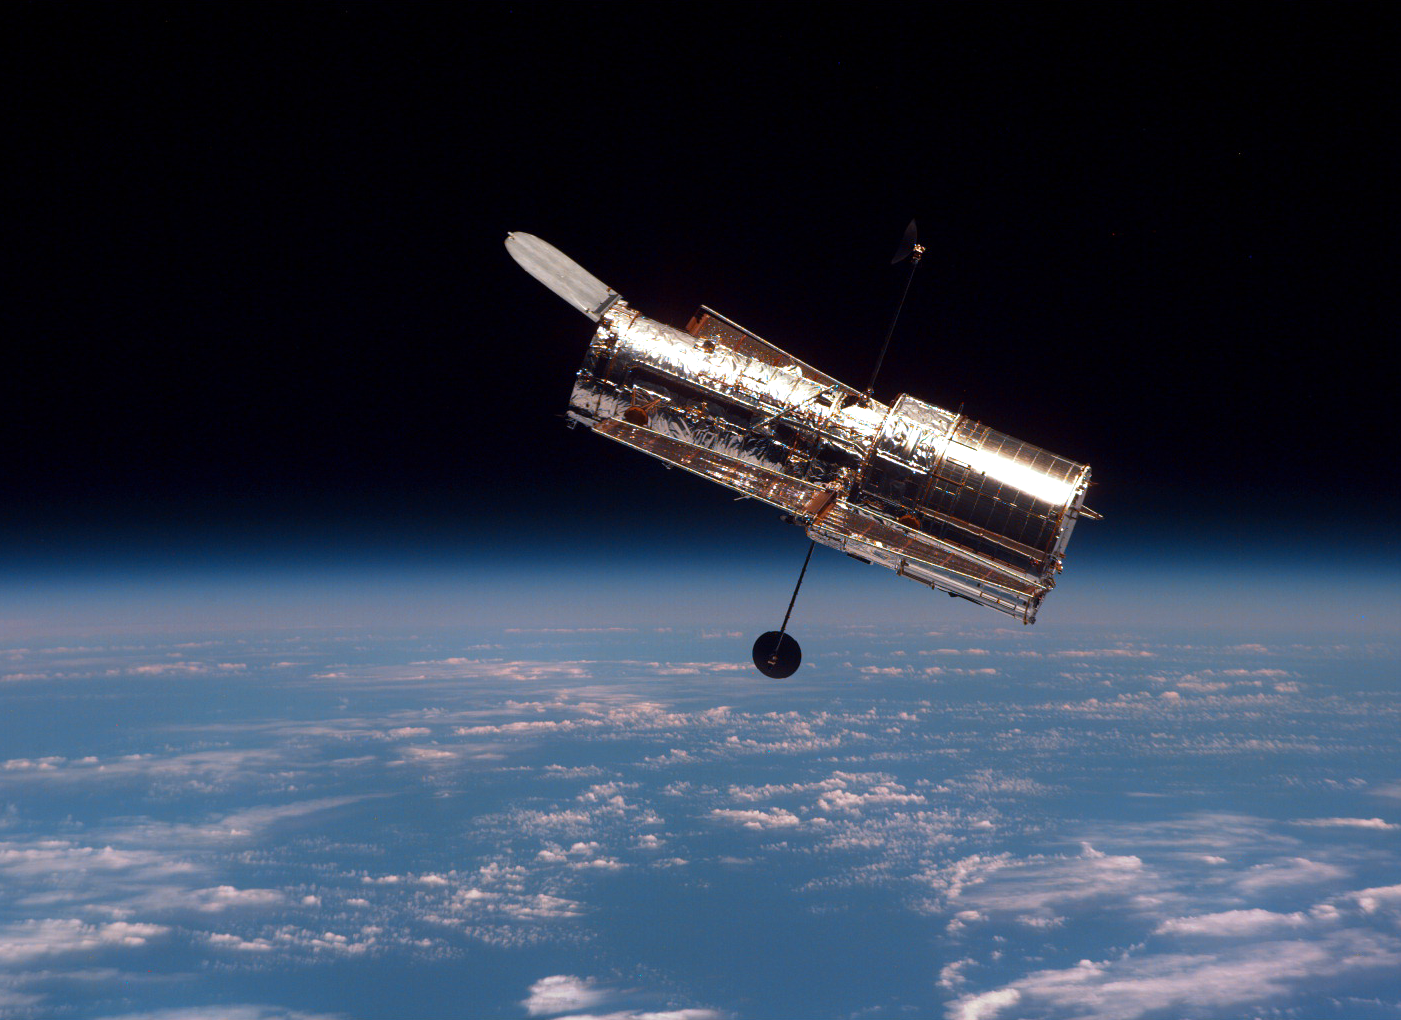

SM2: Hubble in Free Orbit

The Hubble Space Telescope (HST) begins its separation from Discovery following its release. The photo was taken during Servicing Mission 2 in 1997.

Credit: NASA/ESA